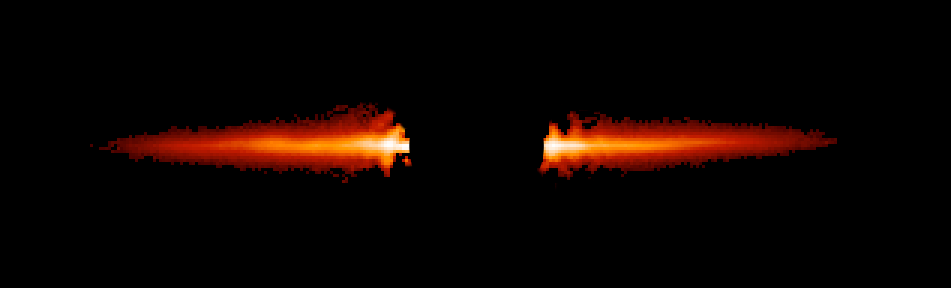

Hubble's Snapshot of Debris Disk Around Young Star - Unannotated

Taken with NASA/ESA Hubble Space Telescope, this image shows light reflected off dust in a debris disk around the young star AU Microscopii.

Credit: NASA/ESA, J. R. Graham and P. Kalas (University of California, Berkeley), and B. Matthews (Hertzberg Institute of Astrophysics)